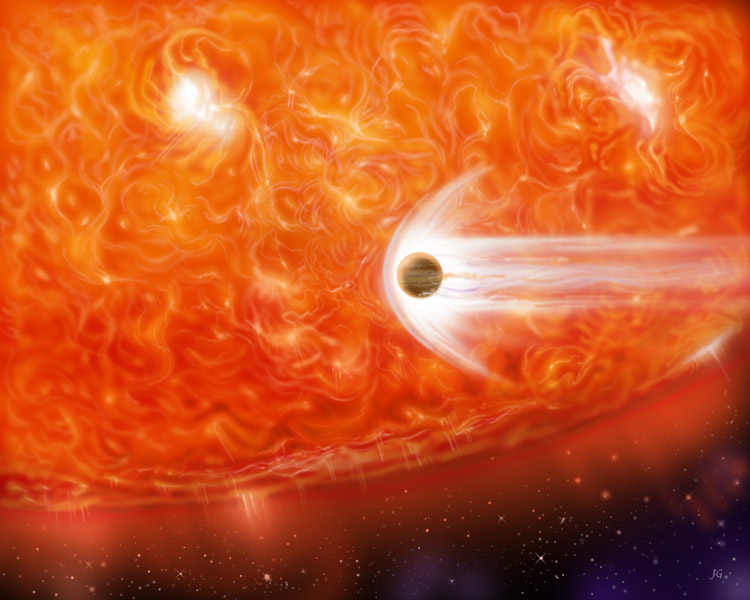

Bloated Stars Swallow Giant Planets (artist's impression)

An unlucky gas giant is consumed by a massive star.

Credit: James Gitlin/STScI AVL